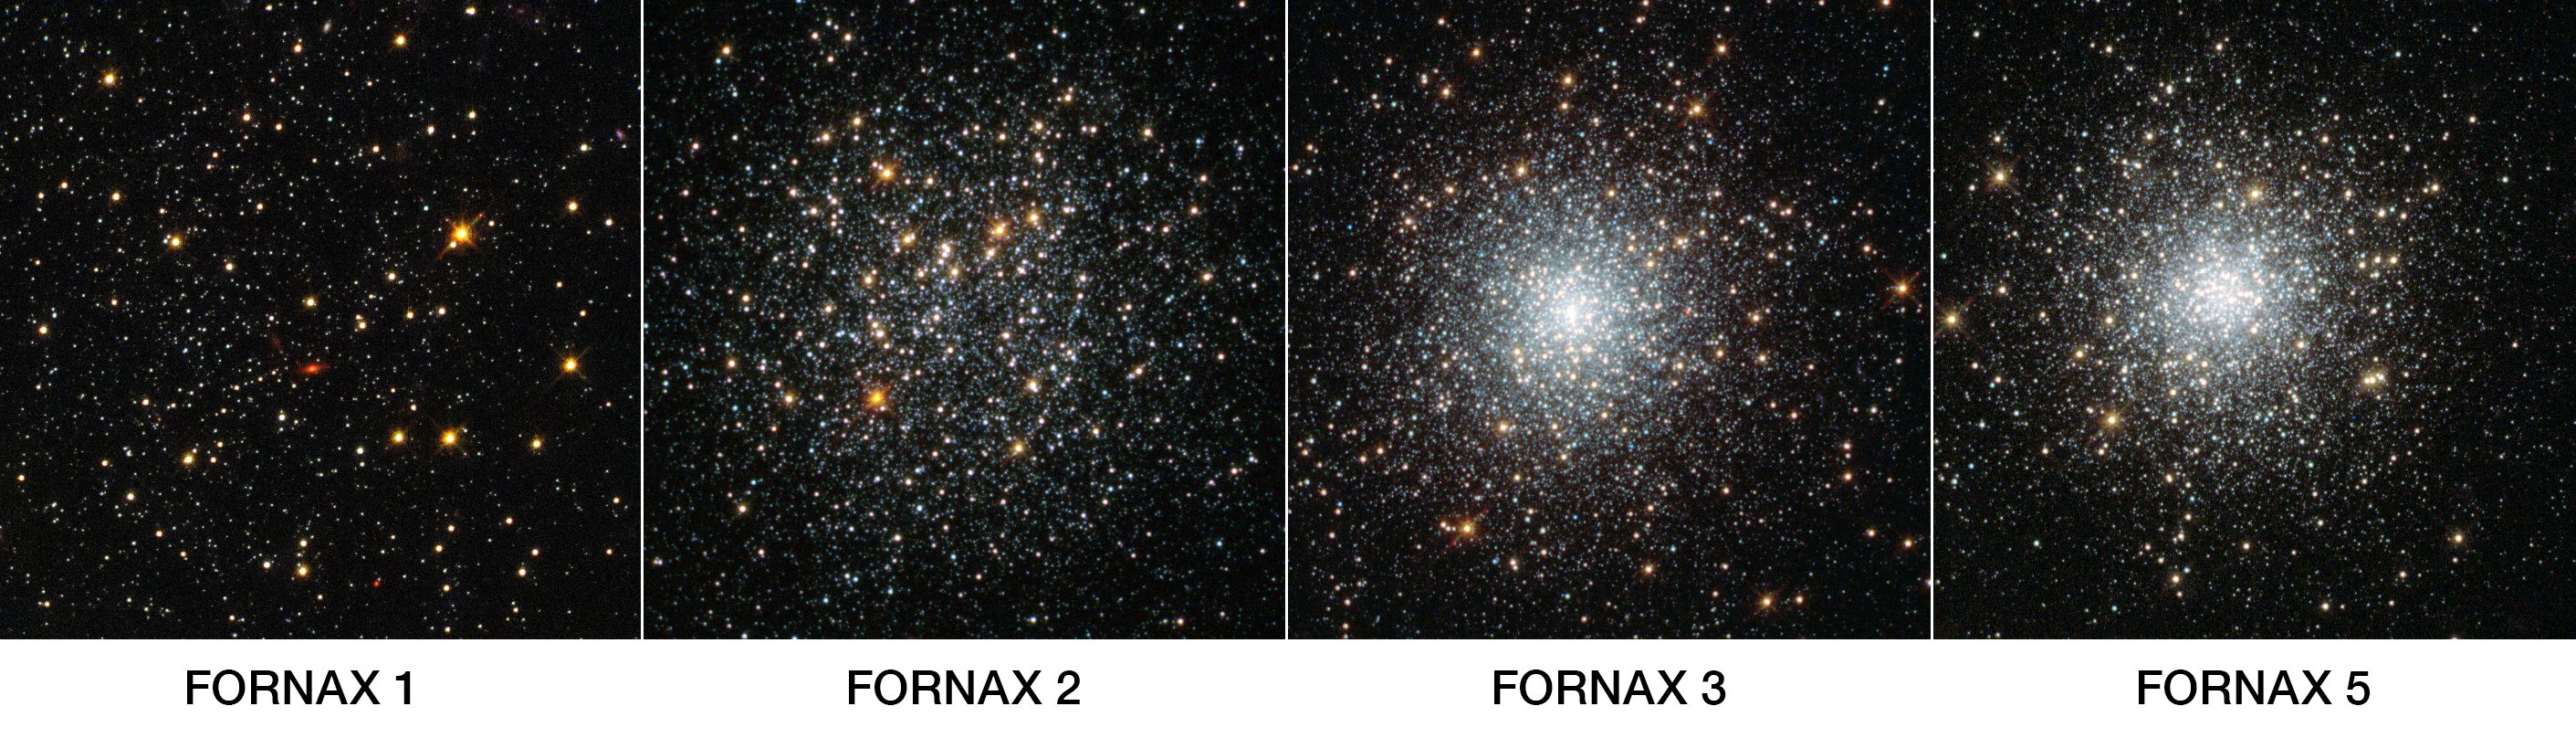

Four globular clusters in Fornax — annotated

This NASA/ESA Hubble Space Telescope image shows four globular clusters in the dwarf galaxy Fornax.

New observations of the clusters — large balls of stars that orbit the centres of galaxies — show they are very similar to those found in our galaxy, the Milky Way. The finding is at odds with leading theories on how these clusters form — in these theories, globular clusters should be nestled among large quantities of old stars — and so the mystery of how these objects came to exist deepens.

As shown in this annotated image, left to right: Fornax 1, Fornax 2, Fornax 3 and Fornax 5. Their positions within the galaxy are shown in image G.

Credit: NASA, ESA, S. Larsen (Radboud University, the Netherlands)